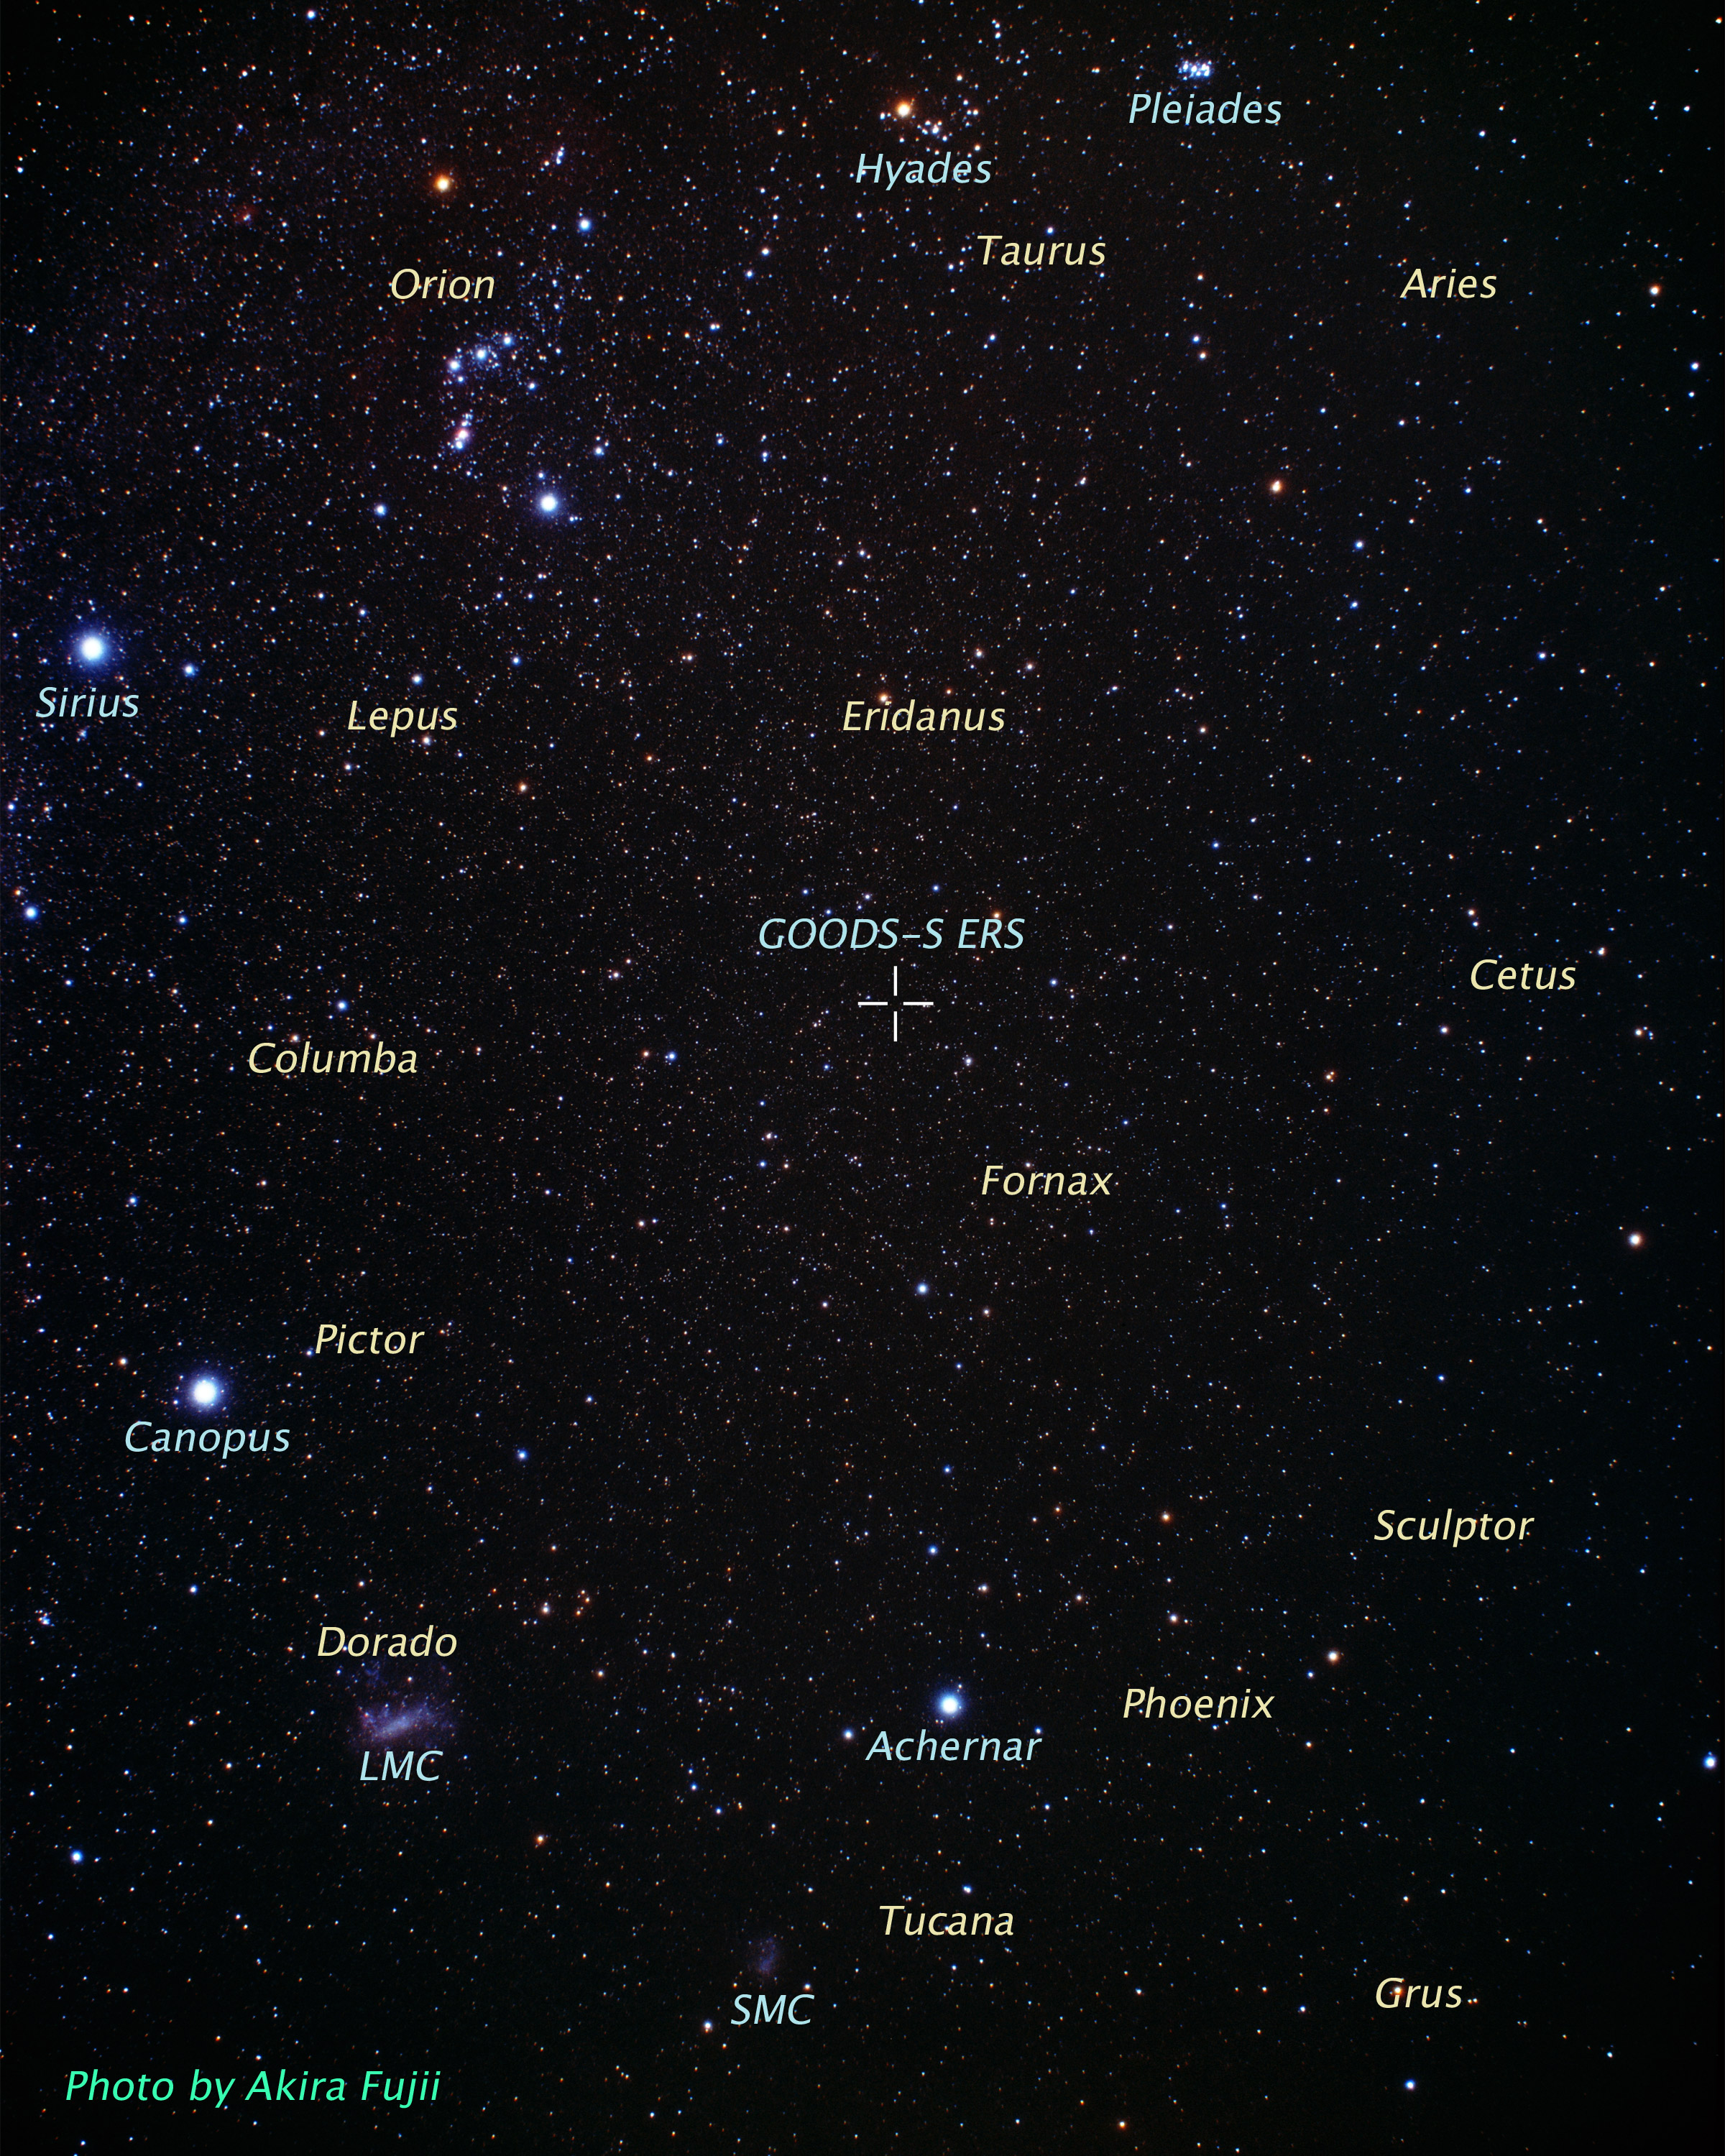

Location of GOODS-S/ERS in the Sky (ground-based image)

This ground based view covers a portion of the southern field of a large galaxy census called the Great Observatories Origins Deep Survey (GOODS), a deep-sky study by several observatories to trace the evolution of galaxies.

Credit: A. Fujii